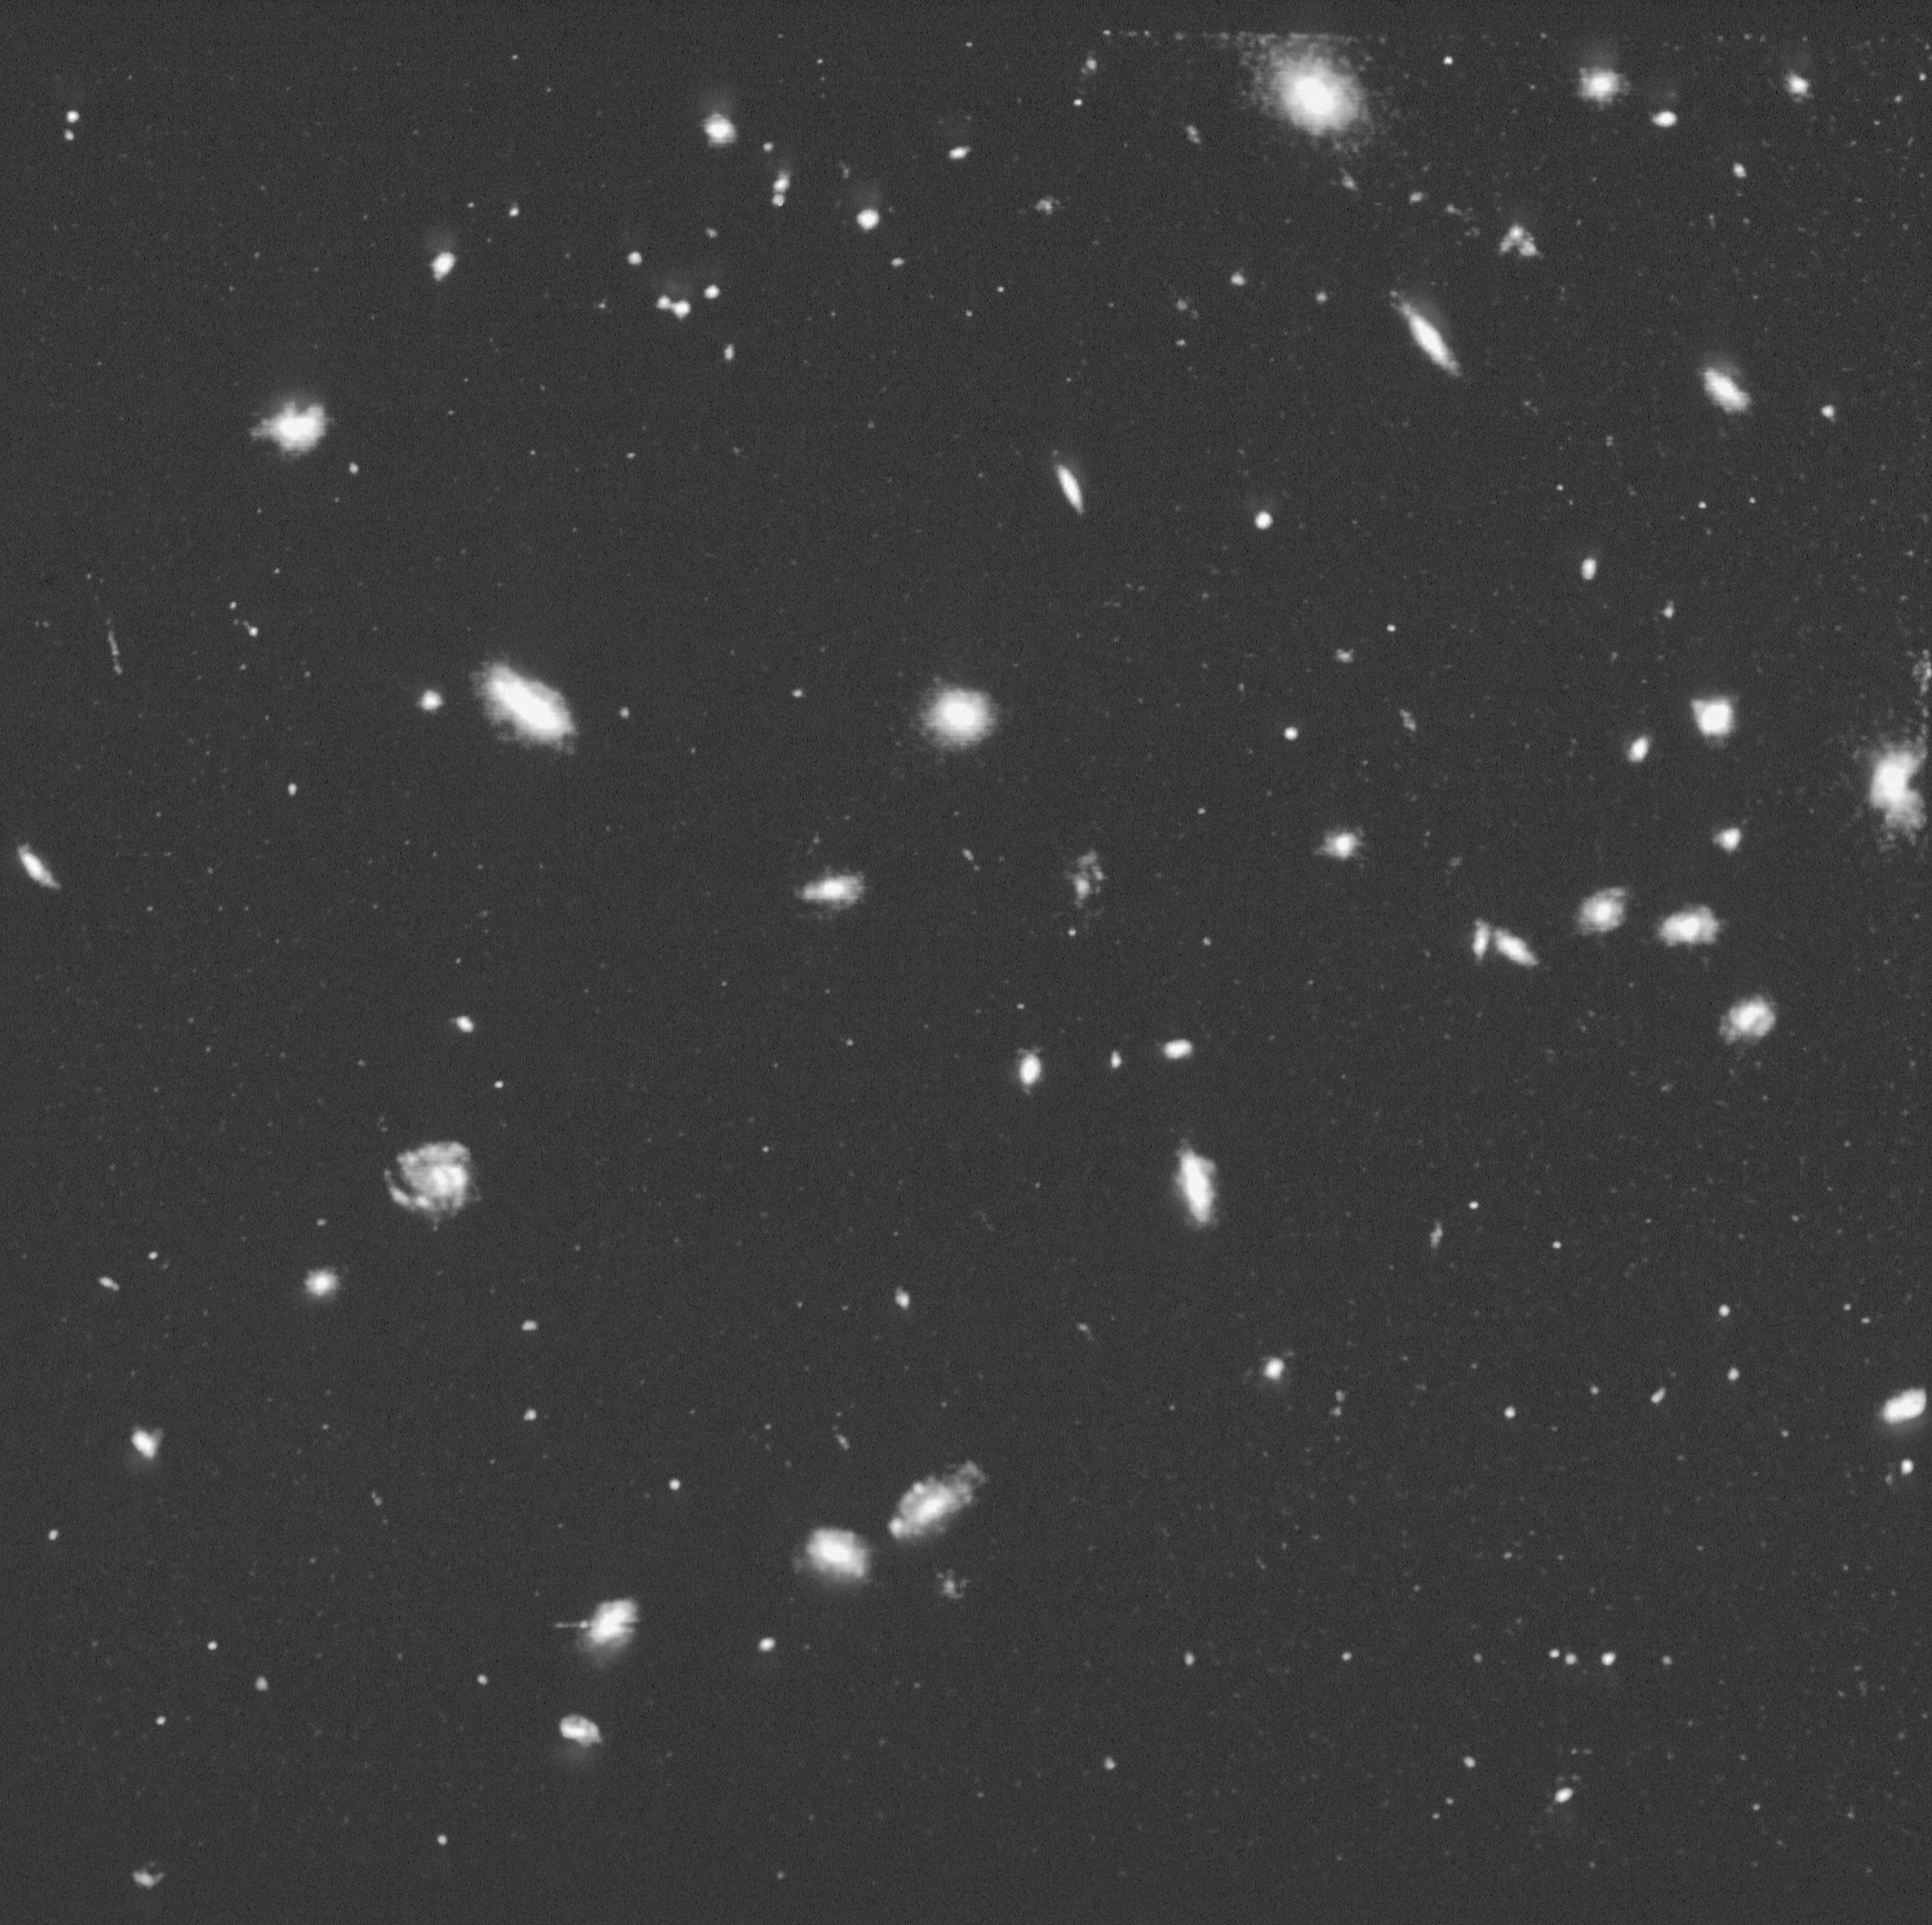

HST photographs a cluster of galaxies four billion light-years away

This is a NASA/ESA Hubble Space Telescope image of a portion of a remote cluster of galaxies (CL 0939+4713) that existed when the universe was two-thirds of its present age (redshift z = 0.4). Hubble's high resolution allows astronomers to study, for the first time, the shapes of galaxies which existed long ago.

The Space Telescope pictures are sharp enough to distinguish between various forms of spiral galaxies, as well as galaxies in collision, some tearing material from each other, some merging into single systems.

Credit: Alan Dressier, Carnegie Institution, and NASA/ESA Co-investigators: Augustus Oemler (Yale Universfty), James E. Gunn (Princeton University), Harvey Butcher (the Netherlands Foundation for Research in Astronomy).